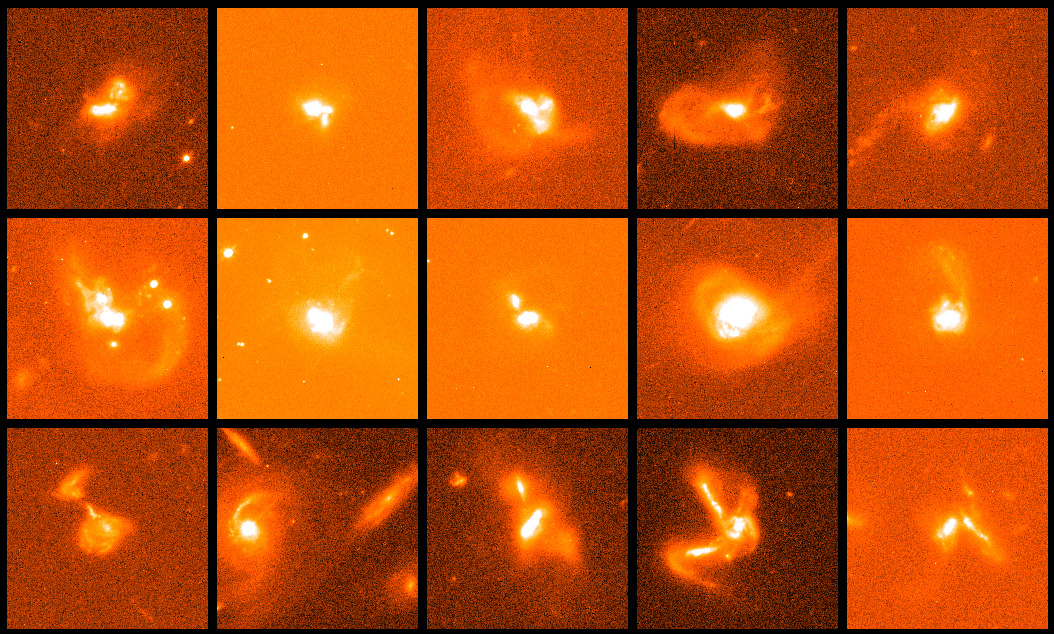

Multiple Galaxy Collisions

Hubble's sharp vision reveals more complexity within these galaxies, which astronomers are interpreting as evidence of a multiple-galaxy pileup. These images, taken by the Wide Field and Planetary Camera 2, are part of a three-year study of 123 galaxies within 3 billion light-years of Earth. The study was conducted in 1996, 1997, and 1999. False colours were assigned to these photos to enhance fine details within these coalescing galaxies.

Credit: NASA/ESA, Kirk Borne (Raytheon and NASA/ESA Goddard Space Flight Center, Greenbelt, Md.), Luis Colina (Instituto de Fisica de Cantabria, Spain), and Howard Bushouse and Ray Lucas ( Space Telescope Science Institute, Baltimore, Md.)